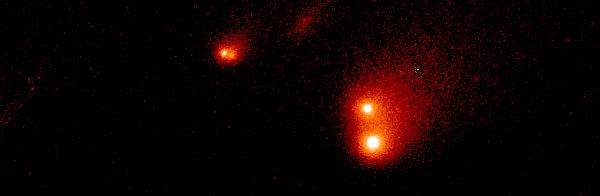

Shoemaker-Levy 9

This Hubble Space Telescope image shows the P-Q complex, also called the "gang of four' region, of Comet P/Shoemaker-Levy 9. It was taken on 30 March 1994 with the WFPC2.

Credit: Dr. H. A. Weaver, Mr. T. E. Smith, and Mr. K. B. Jones (STScI), and NASA